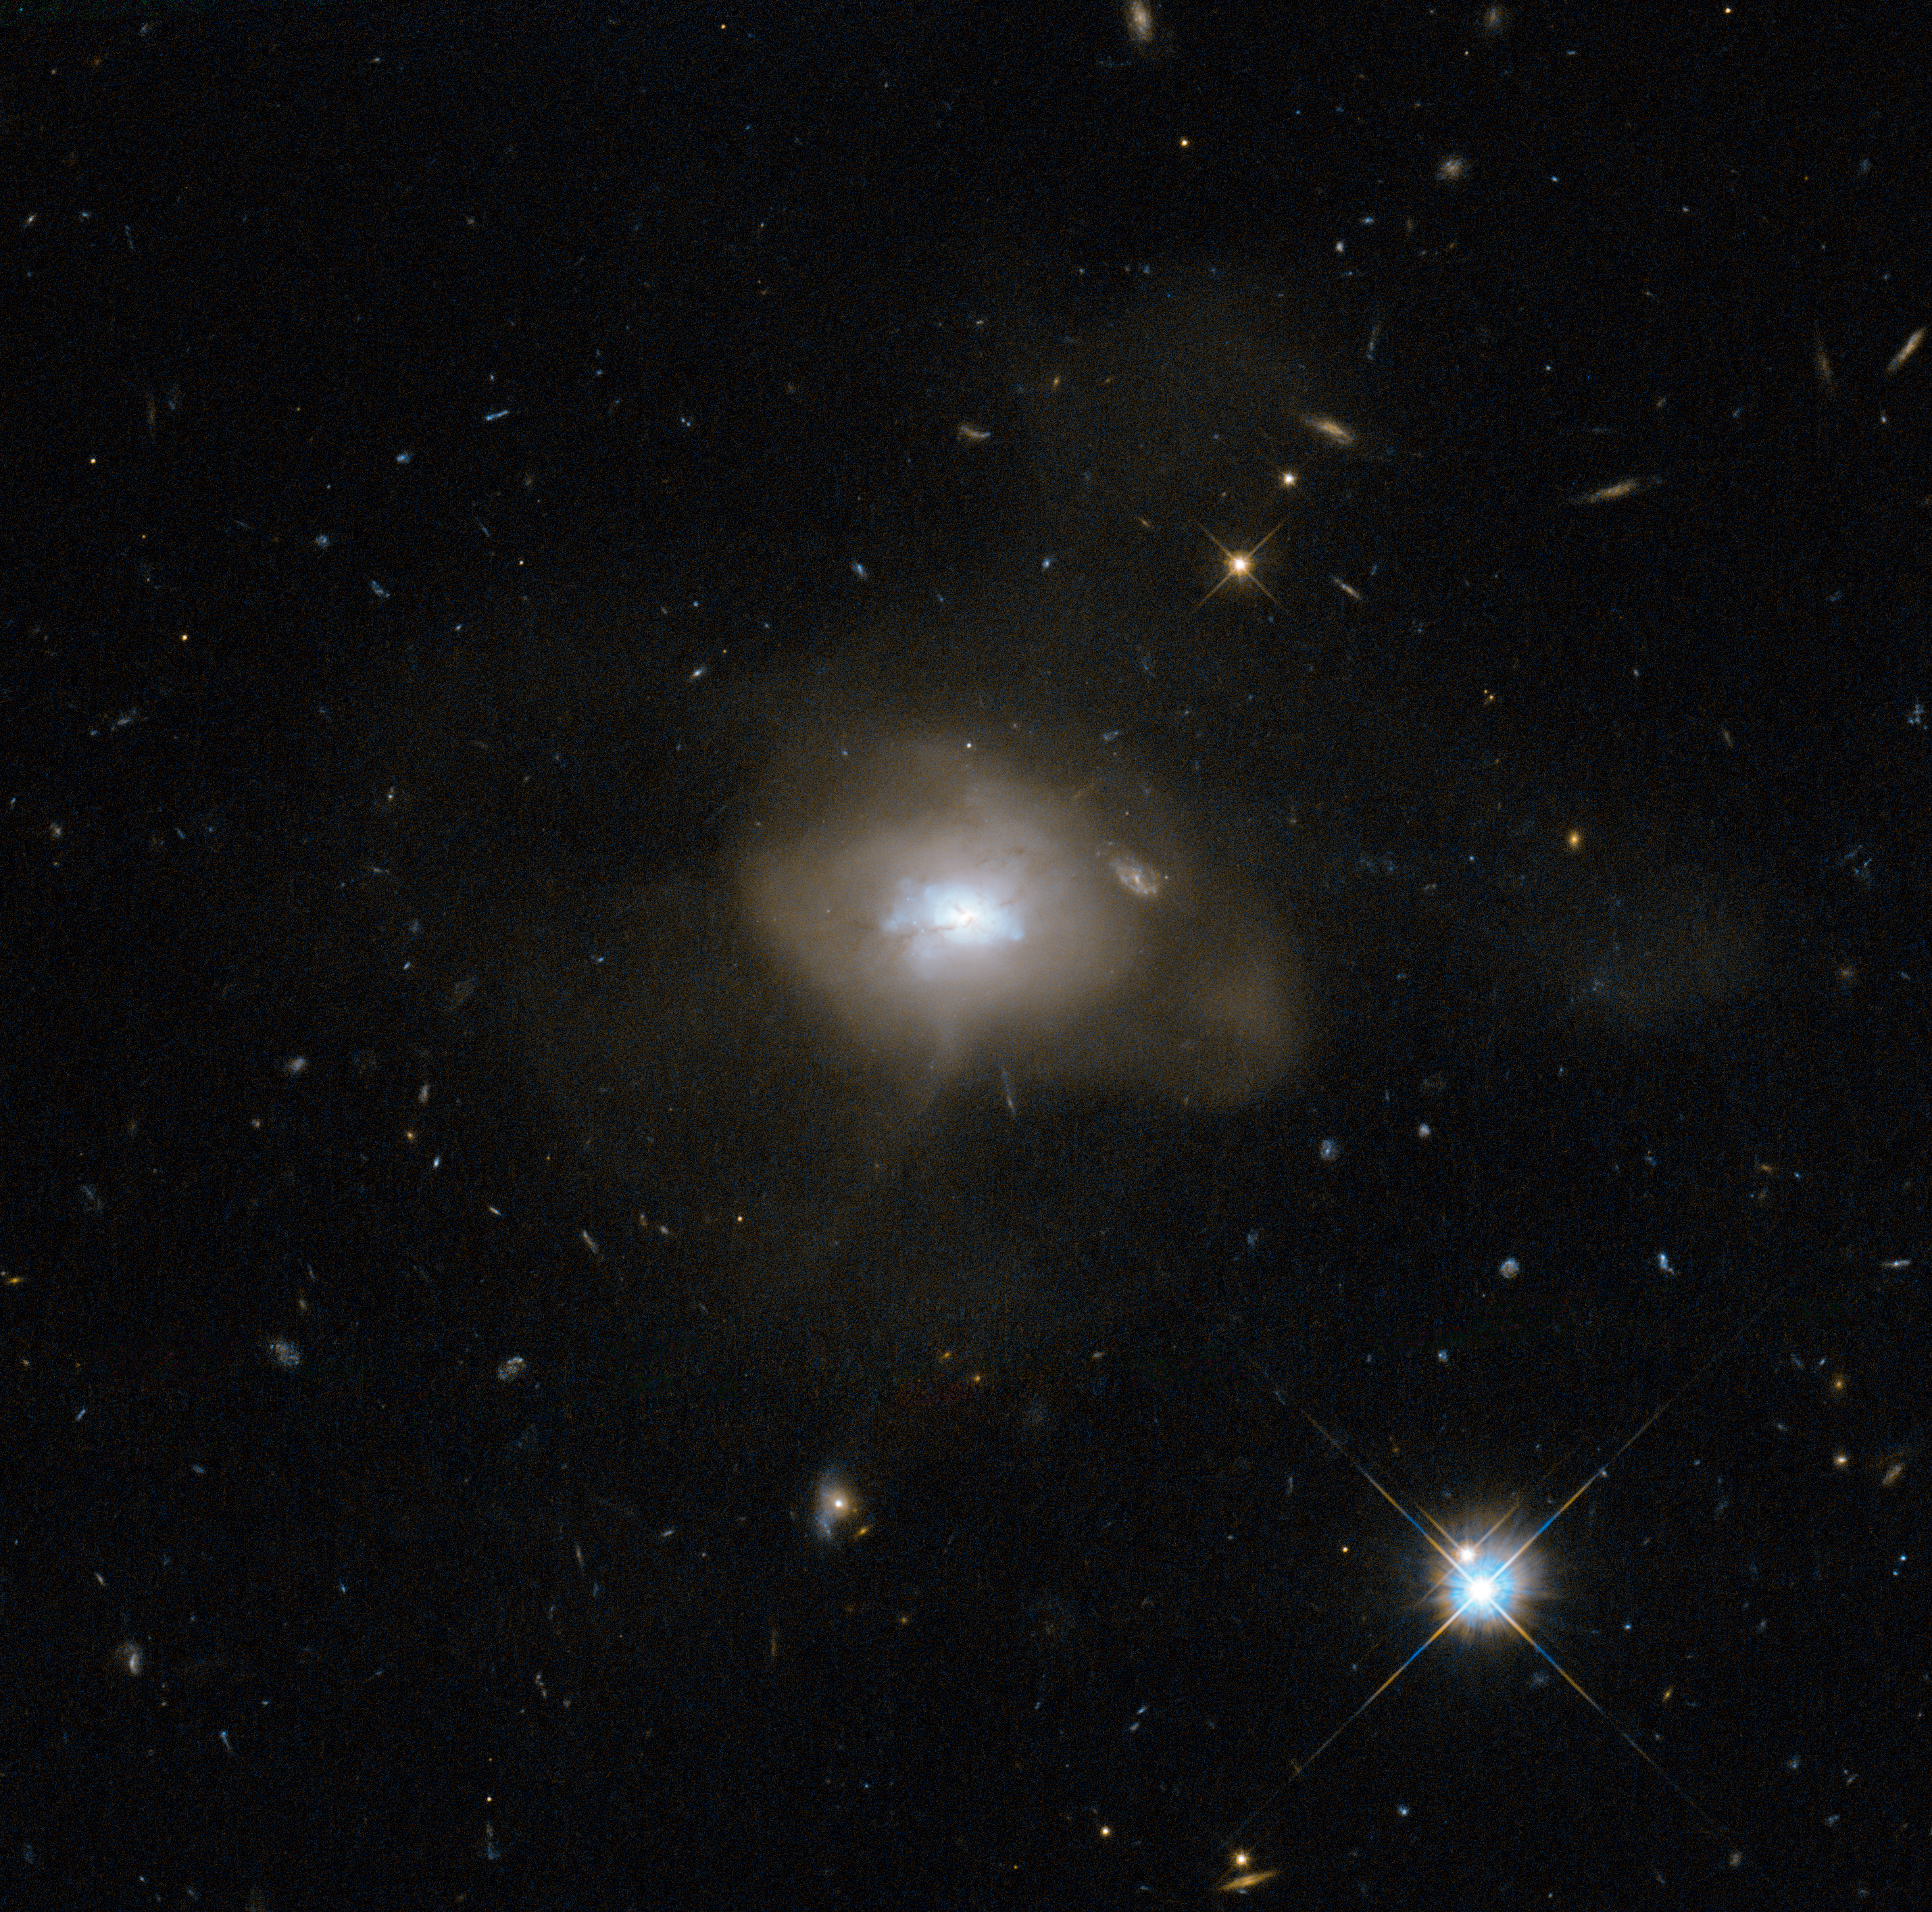

The calm after the galactic storm

The NASA/ESA Hubble Space Telescope has caught sight of a soft, diffuse-looking galaxy that is probably the aftermath of a long-ago galactic collision. Two spiral galaxies, each perhaps much like the Milky Way, swirled together for millions of years.

In such mergers, the original galaxies are often stretched and pulled apart as they wrap around a common centre of gravity. After a few back-and-forths, this starry tempest settles down into a new, round object. The now subdued celestial body, catalogued as SDSS J162702.56+432833.9, is technically known as an elliptical galaxy.

When galaxies collide — a common event in the Universe — a fresh burst of star formation typically takes place as gas clouds mash together. At this point, the galaxy has a blue hue, but the colour does not mean it is cold: it is a result of the intense heat of newly formed blue–white stars. Those stars do not last long, and after a few billion years the reddish hues of aging smaller stars dominate an elliptical galaxy's spectrum. Hubble has helped astronomers learn of this sequence by observing galaxy mergers at all stages of the process.

In SDSS J162702.56+432833.9, some ribbons of dust notably obscure parts of the conglomerated galaxy's central, bluish region. Those dust lanes could be remnants of the spiral arms of the recently departed galaxies.

This picture was snapped by the Wide Field Camera of Hubble’s Advanced Camera for Surveys. The image was made through a red (F625W) and a blue (F438W) filter. The field of view is approximately 2.4 by 2.4 arcminutes.

Credit: ESA/Hubble & NASA